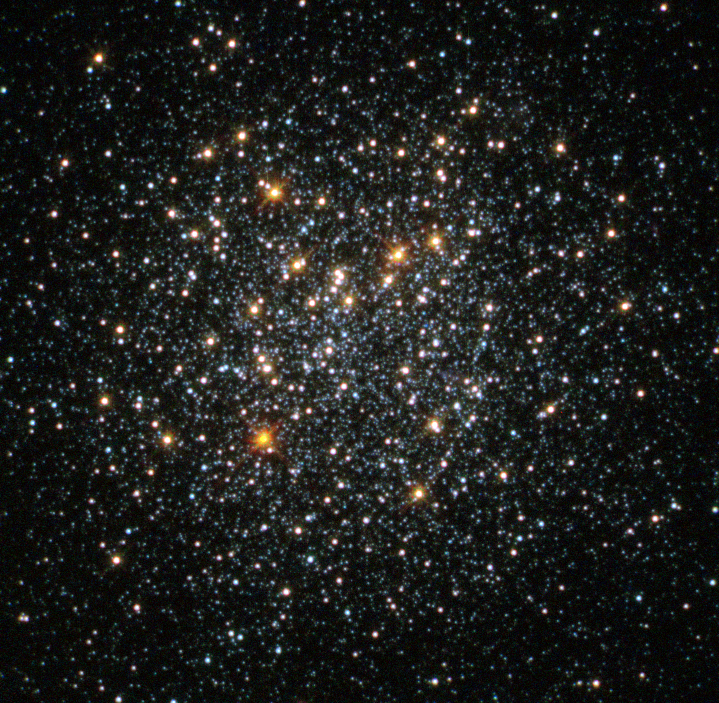

Globular cluster Fornax 2

This NASA/ESA Hubble Space Telescope image shows the globular cluster Fornax 2 in the dwarf galaxy Fornax.

New observations of this cluster and three others in the galaxy show that they are very similar to those found in our galaxy, the Milky Way. The finding is at odds with leading theories on how these clusters form — in these theories, globular clusters should be nestled among large quantities of old stars — and so the mystery of how these objects came to exist deepens.

This cluster’s position within the galaxy is shown in image G.

Credit: NASA, ESA, S. Larsen (Radboud University, the Netherlands)